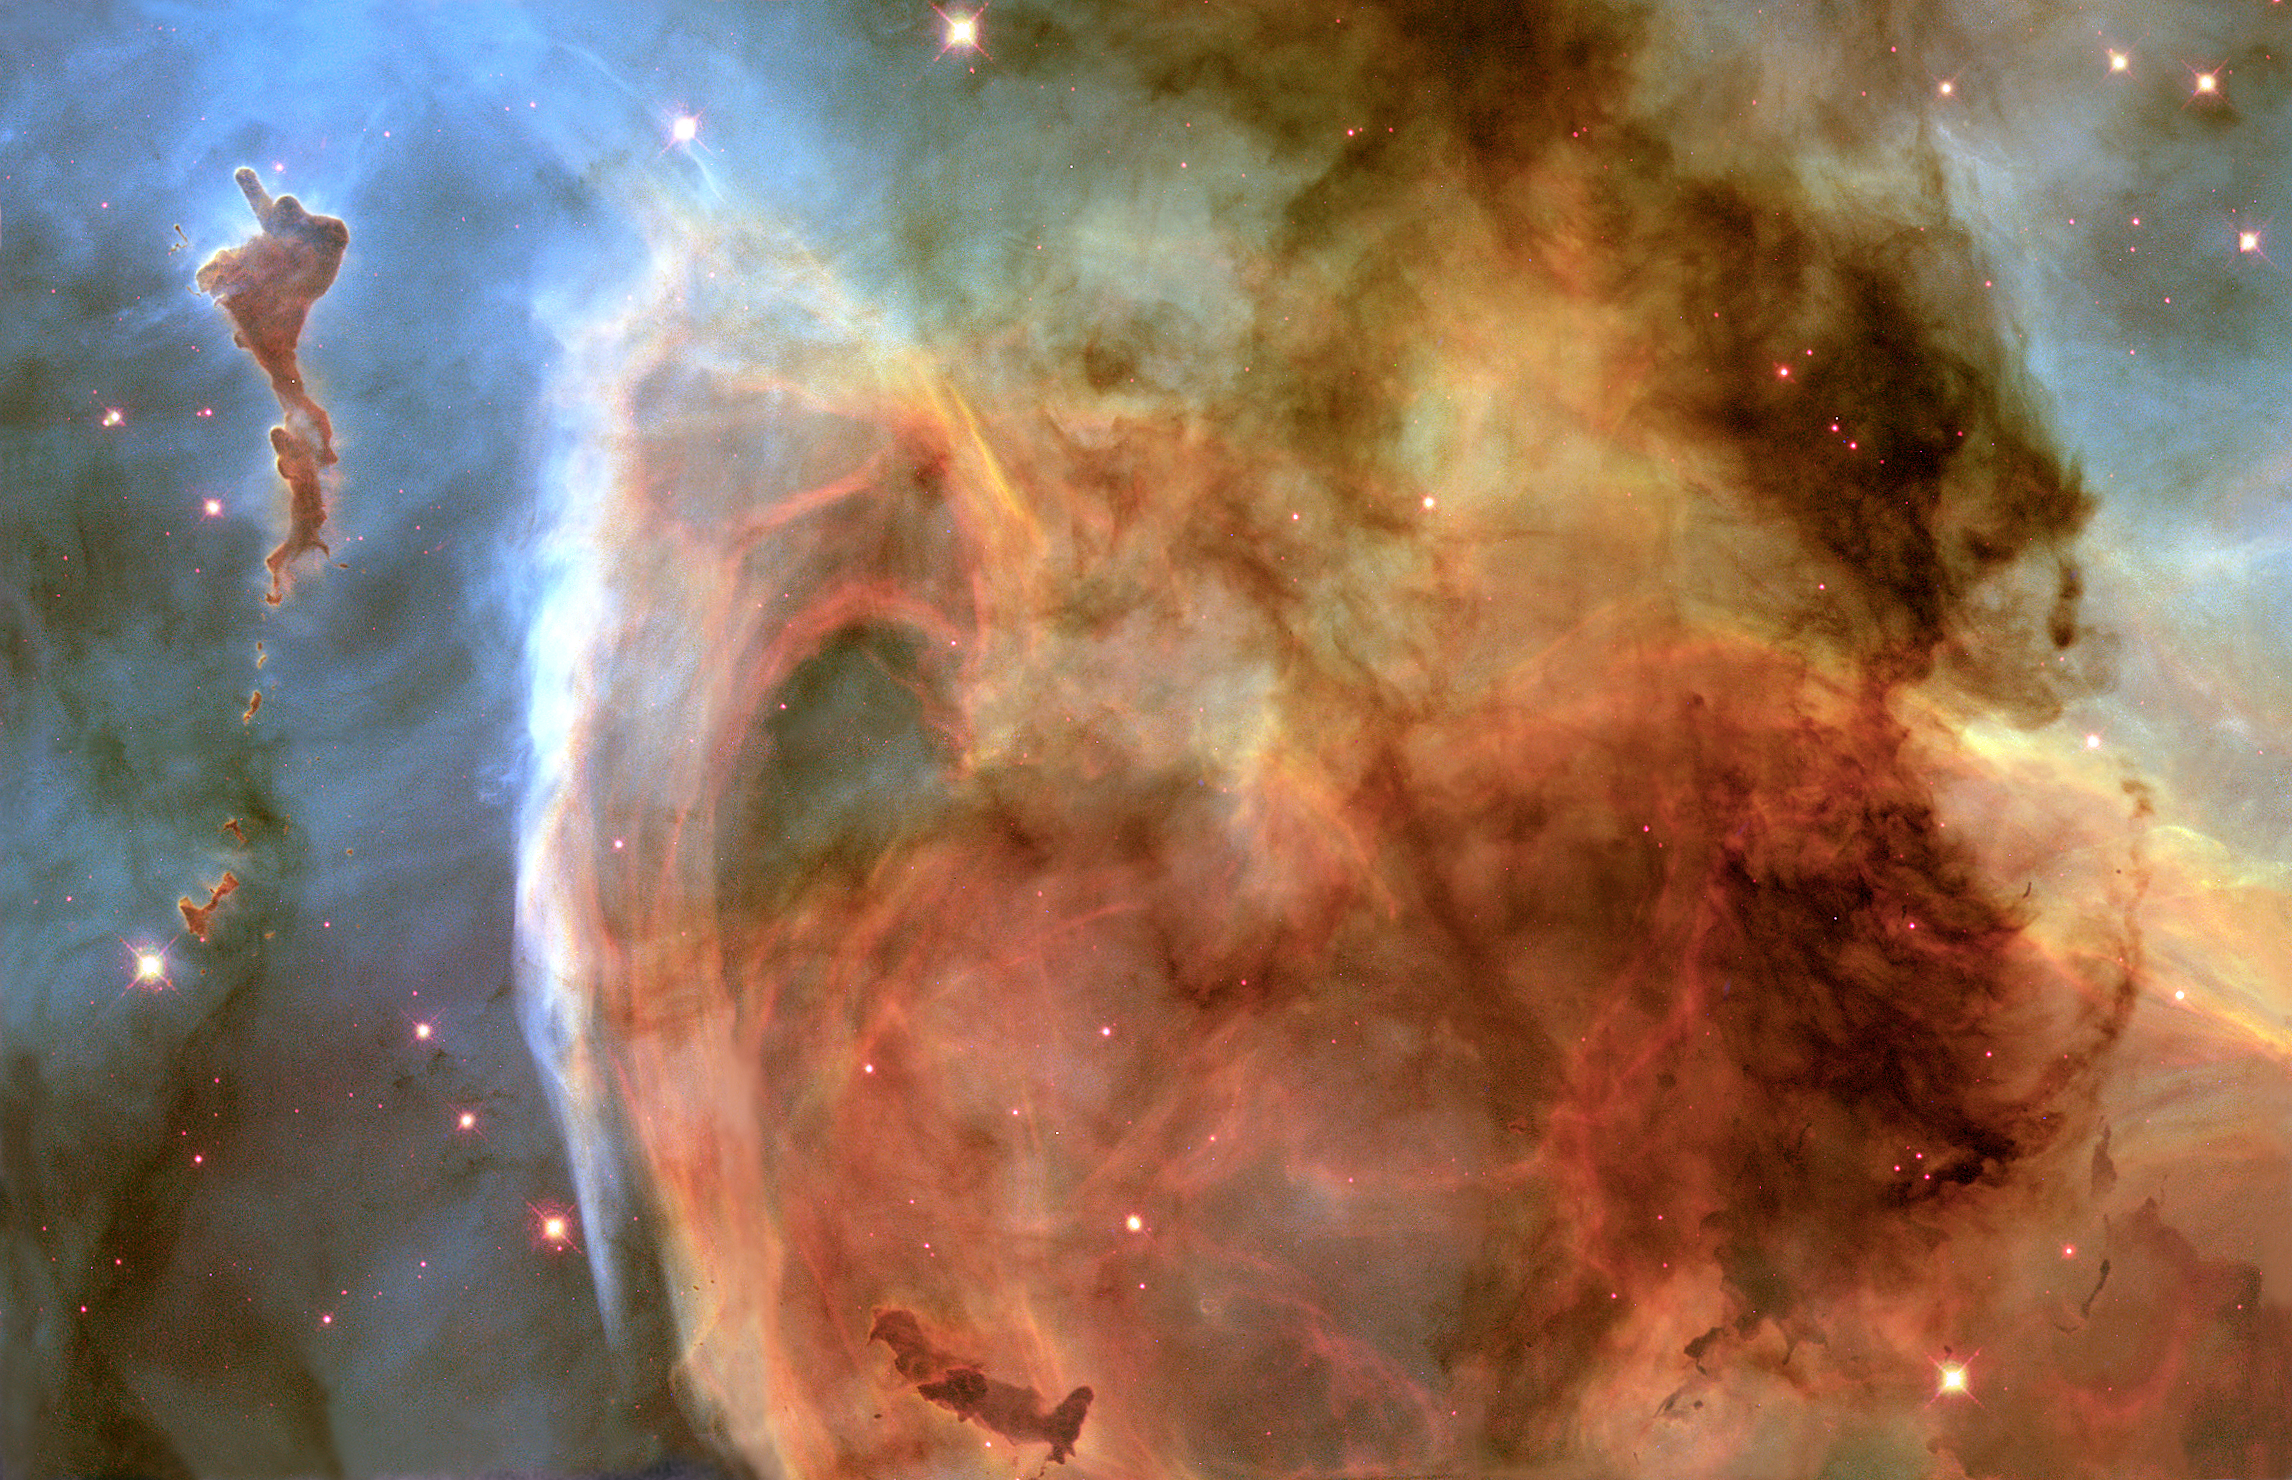

Light and shadow in the Carina Nebula

Previously unseen details of a mysterious, complex structure within the Carina Nebula (NGC 3372) are revealed by this image of the 'Keyhole Nebula, ' obtained with the Hubble Space Telescope. The picture is a montage assembled from four different April 1999 telescope pointings with Hubble's Wide Field Planetary Camera 2, which used six different colour filters. The picture is dominated by a large, approximately circular feature, which is part of the Keyhole Nebula, named in the 19th century by Sir John Herschel. This region, about 8000 light-years from Earth, is located adjacent to the famous explosive variable star Eta Carinae, which lies just outside the field of view toward the upper right. The Carina Nebula also contains several other stars that are among the hottest and most massive known, each about 10 times as hot, and 100 times as massive, as our Sun.

Credit: NASA/ESA, The Hubble Heritage Team (AURA/STScI)